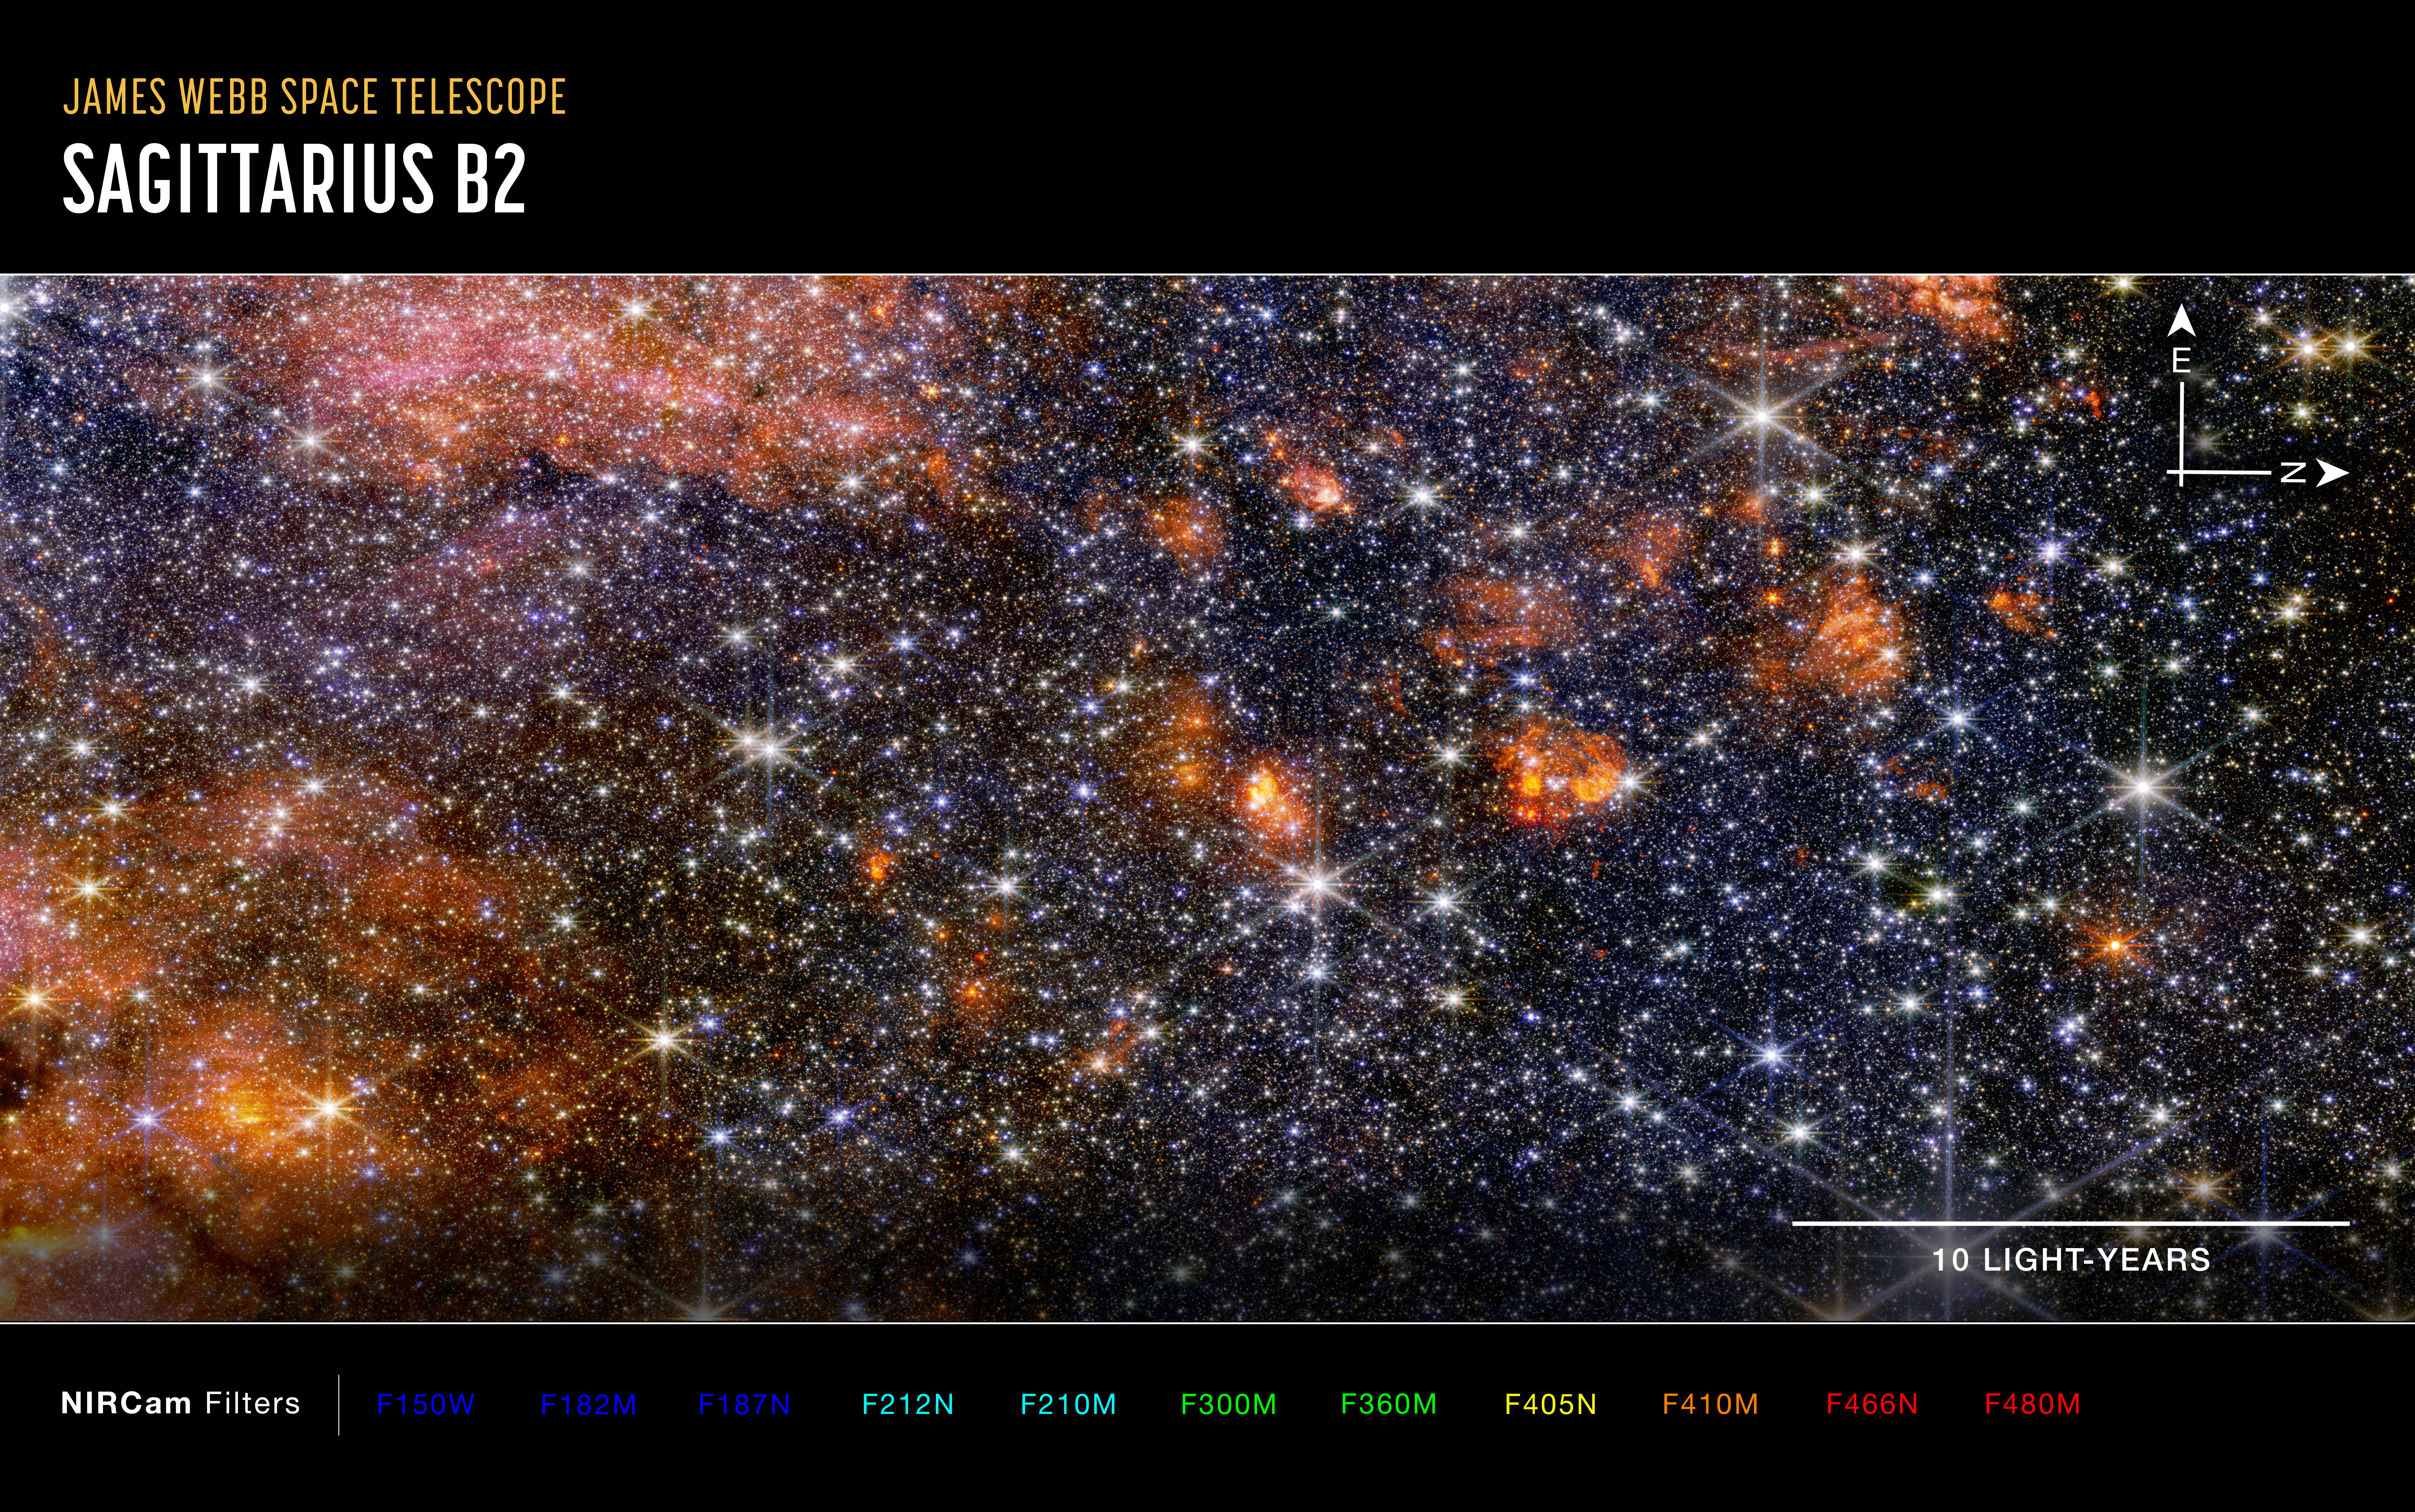

Sagittarius B2 (NIRCam image, annotated)

This image of the Sagittarius B2 (Sgr B2) molecular cloud, captured by Webb’s NIRCam (Near-Infrared Camera) instrument includes compass arrows, scale bar, and colour key for reference.

To create this image, near-infrared wavelengths of light have been translated into visible-light colours. The colour key at the bottom shows which NIRCam filters were used, and which visible-light colour was assigned to that filter.

The north and east compass arrows show the orientation of the image on the sky. Note that the relationship between north and east on the sky (as seen from below) is flipped relative to direction arrows on a map of the ground (as seen from above).

Credit: NASA, ESA, CSA, STScI, A. Ginsburg (University of Florida), N. Budaiev (University of Florida), T. Yoo (University of Florida). Image processing: A. Pagan (STScI)